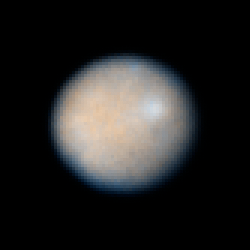

Ceres: 30 December 2003 16:21 UT

Ceres, the largest known asteroid, showing dark patches which could be impact features from smaller asteroids.

Credit: NASA, ESA, J. Parker (Southwest Research Institute), P. Thomas (Cornell University), L. McFadden (University of Maryland, College Park), and M. Mutchler and Z. Levay (STScI)